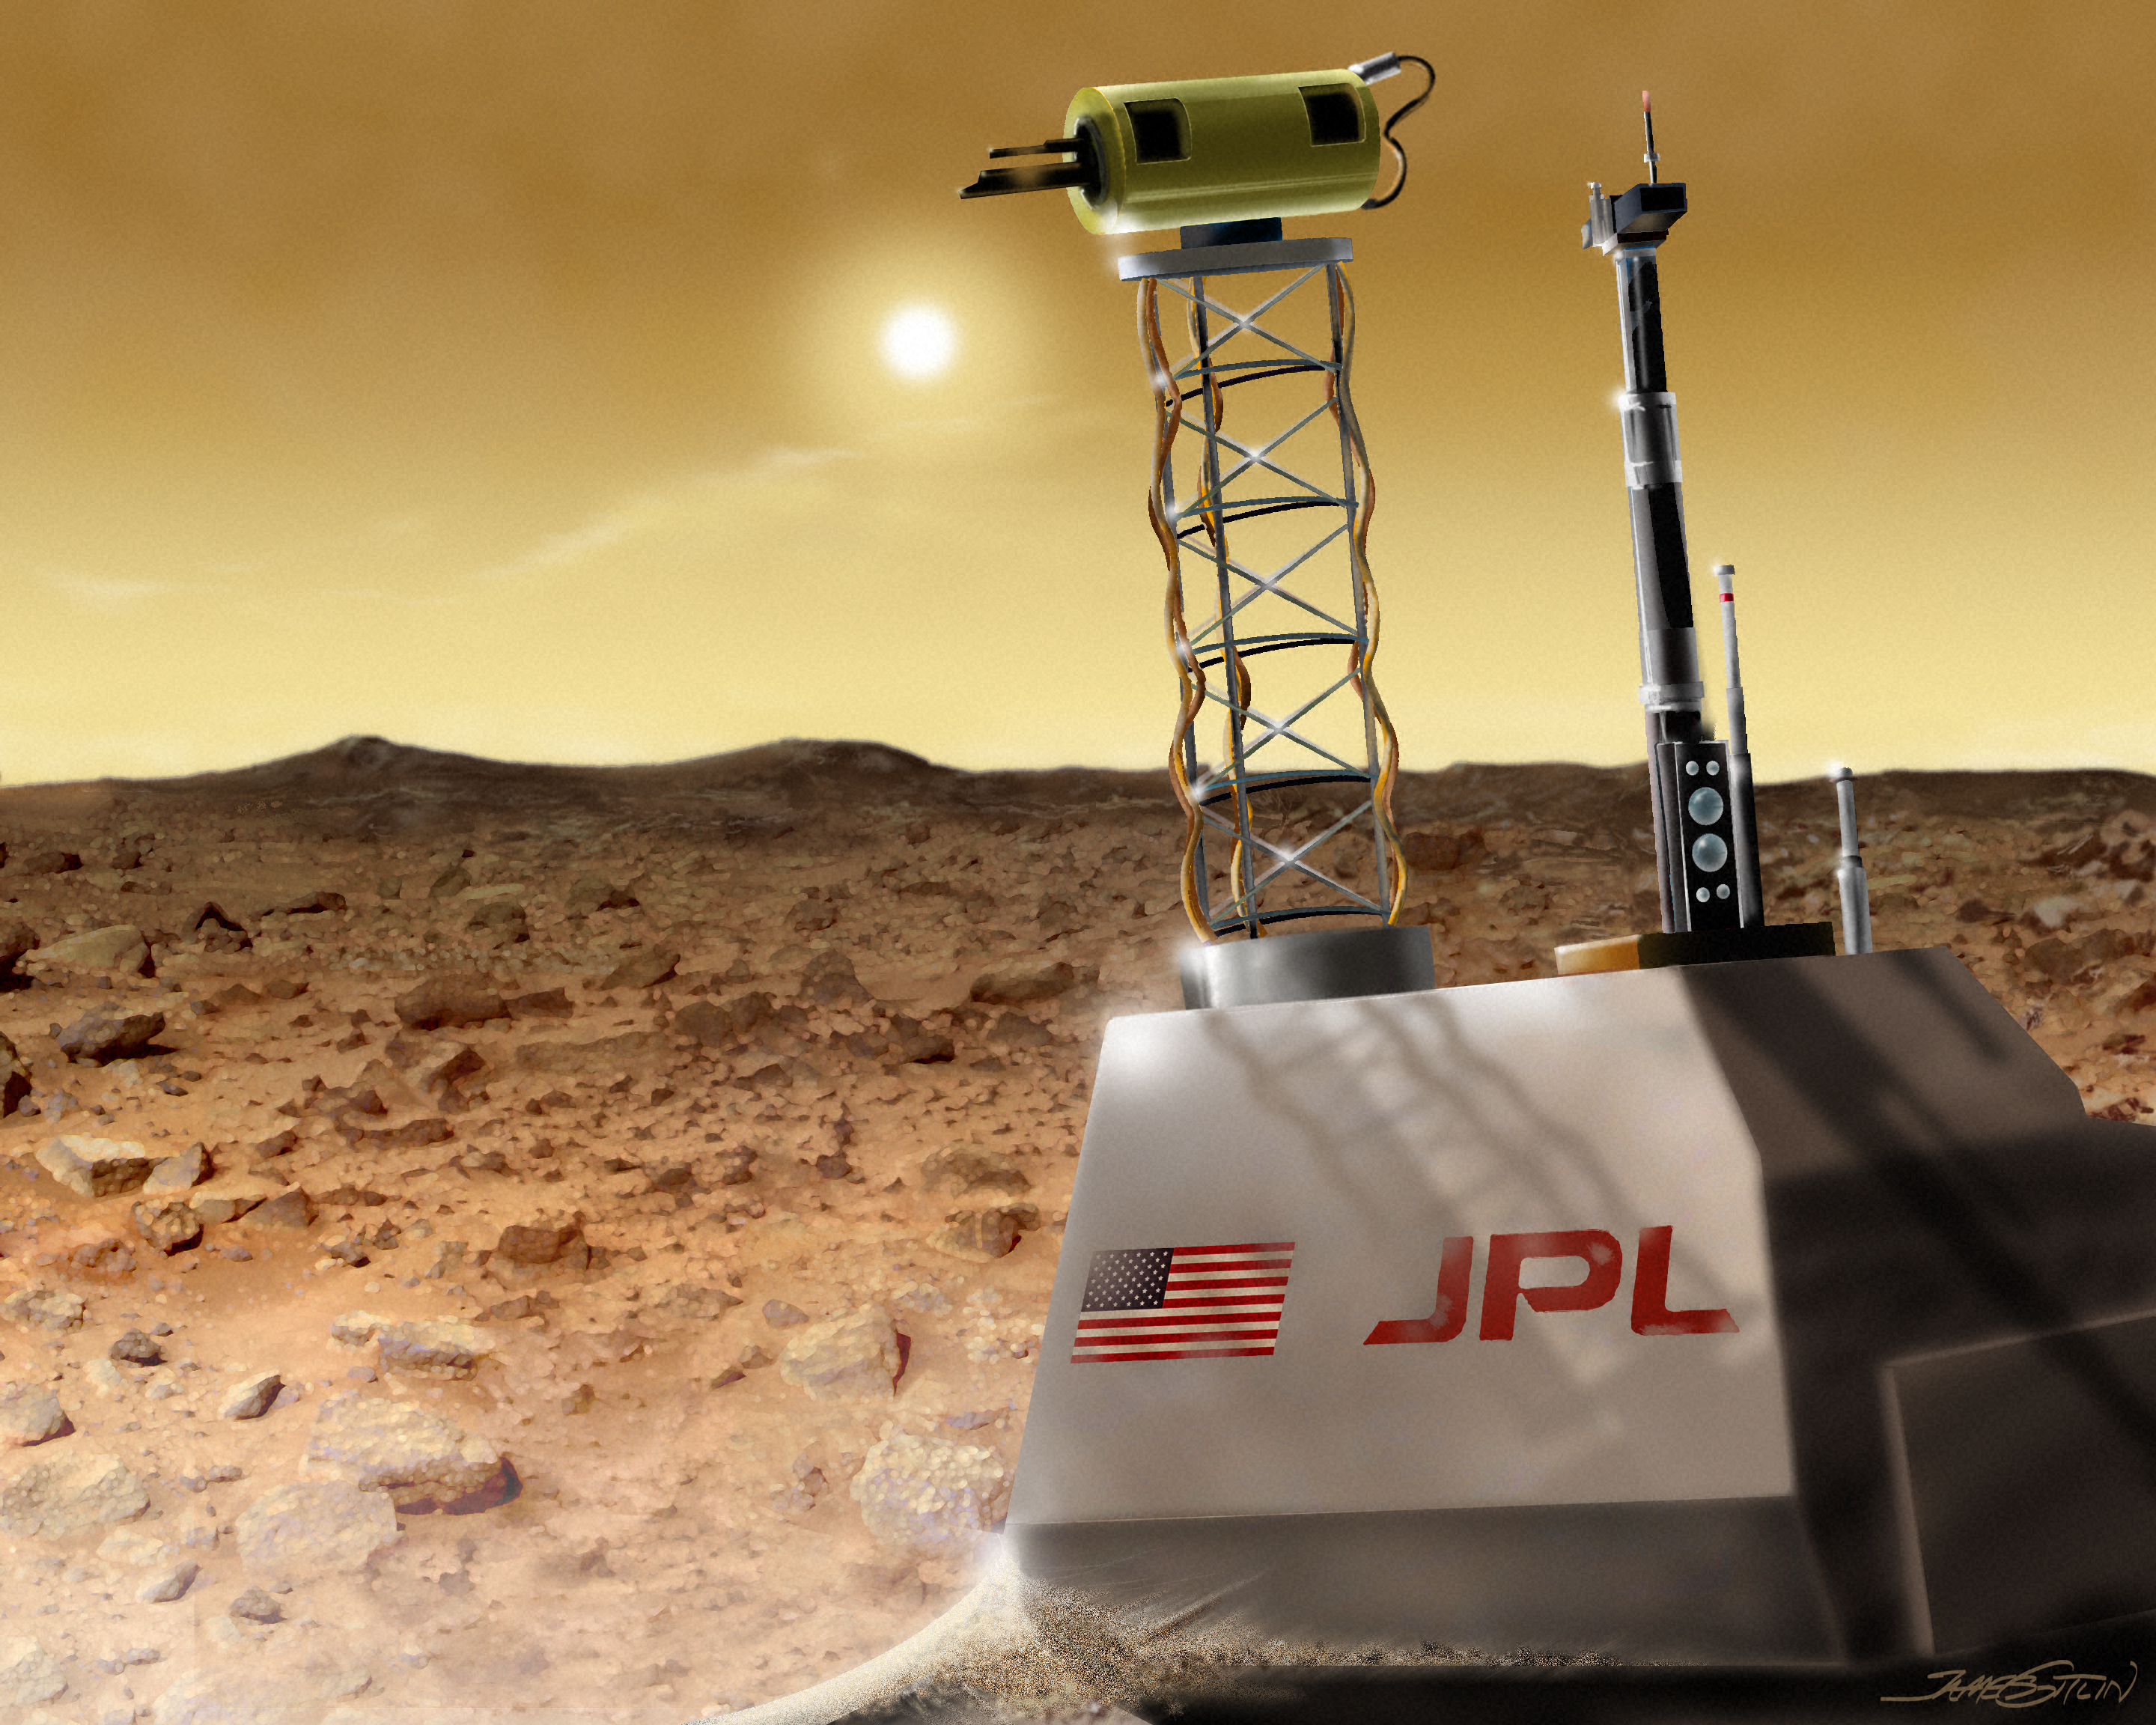

View of Martian surface before dust storm (artist's impression)

The calm before the storm: a Martian rover sits in wait (artist's impression).

Credit: James Gitlin (STScI)